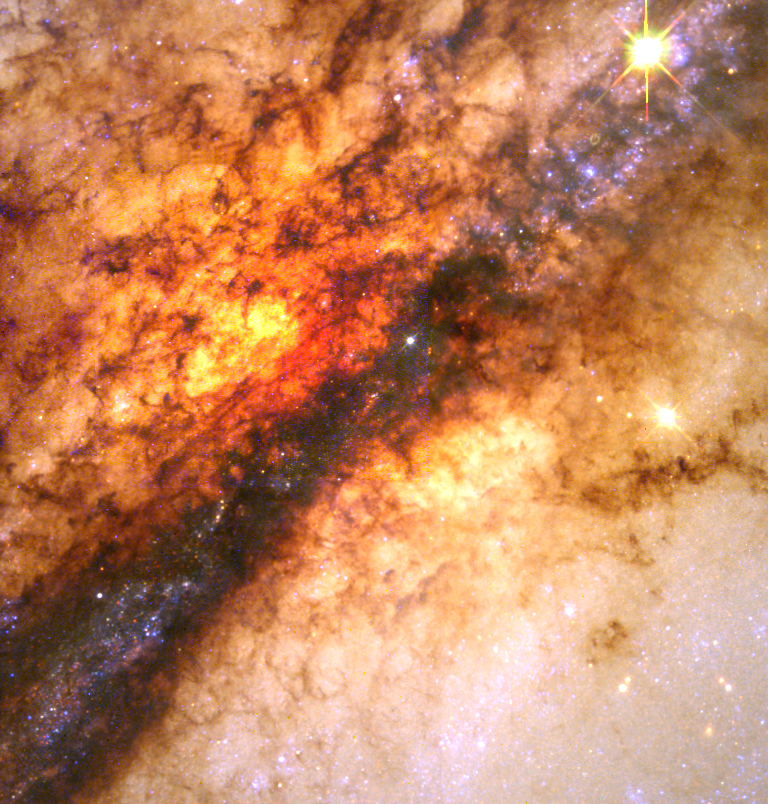

Centaurus A Nucleus

A close-up high resolution Wide Field Planetary Camera 2 image of the dramatic dust disk which is thought to be the remnant of a smaller spiral galaxy that merged with the large elliptical galaxy. The shock of the collision compressed interstellar gas, precipitating a flurry of star formation and giving the material a fleecy pattern. Dark filaments of dust mixed with cold hydrogen gas are silhouetted against the incandescent yellow-orange glow from stars behind it.

Credit: E.J. Schreier, (STScI) and NASA/ESA